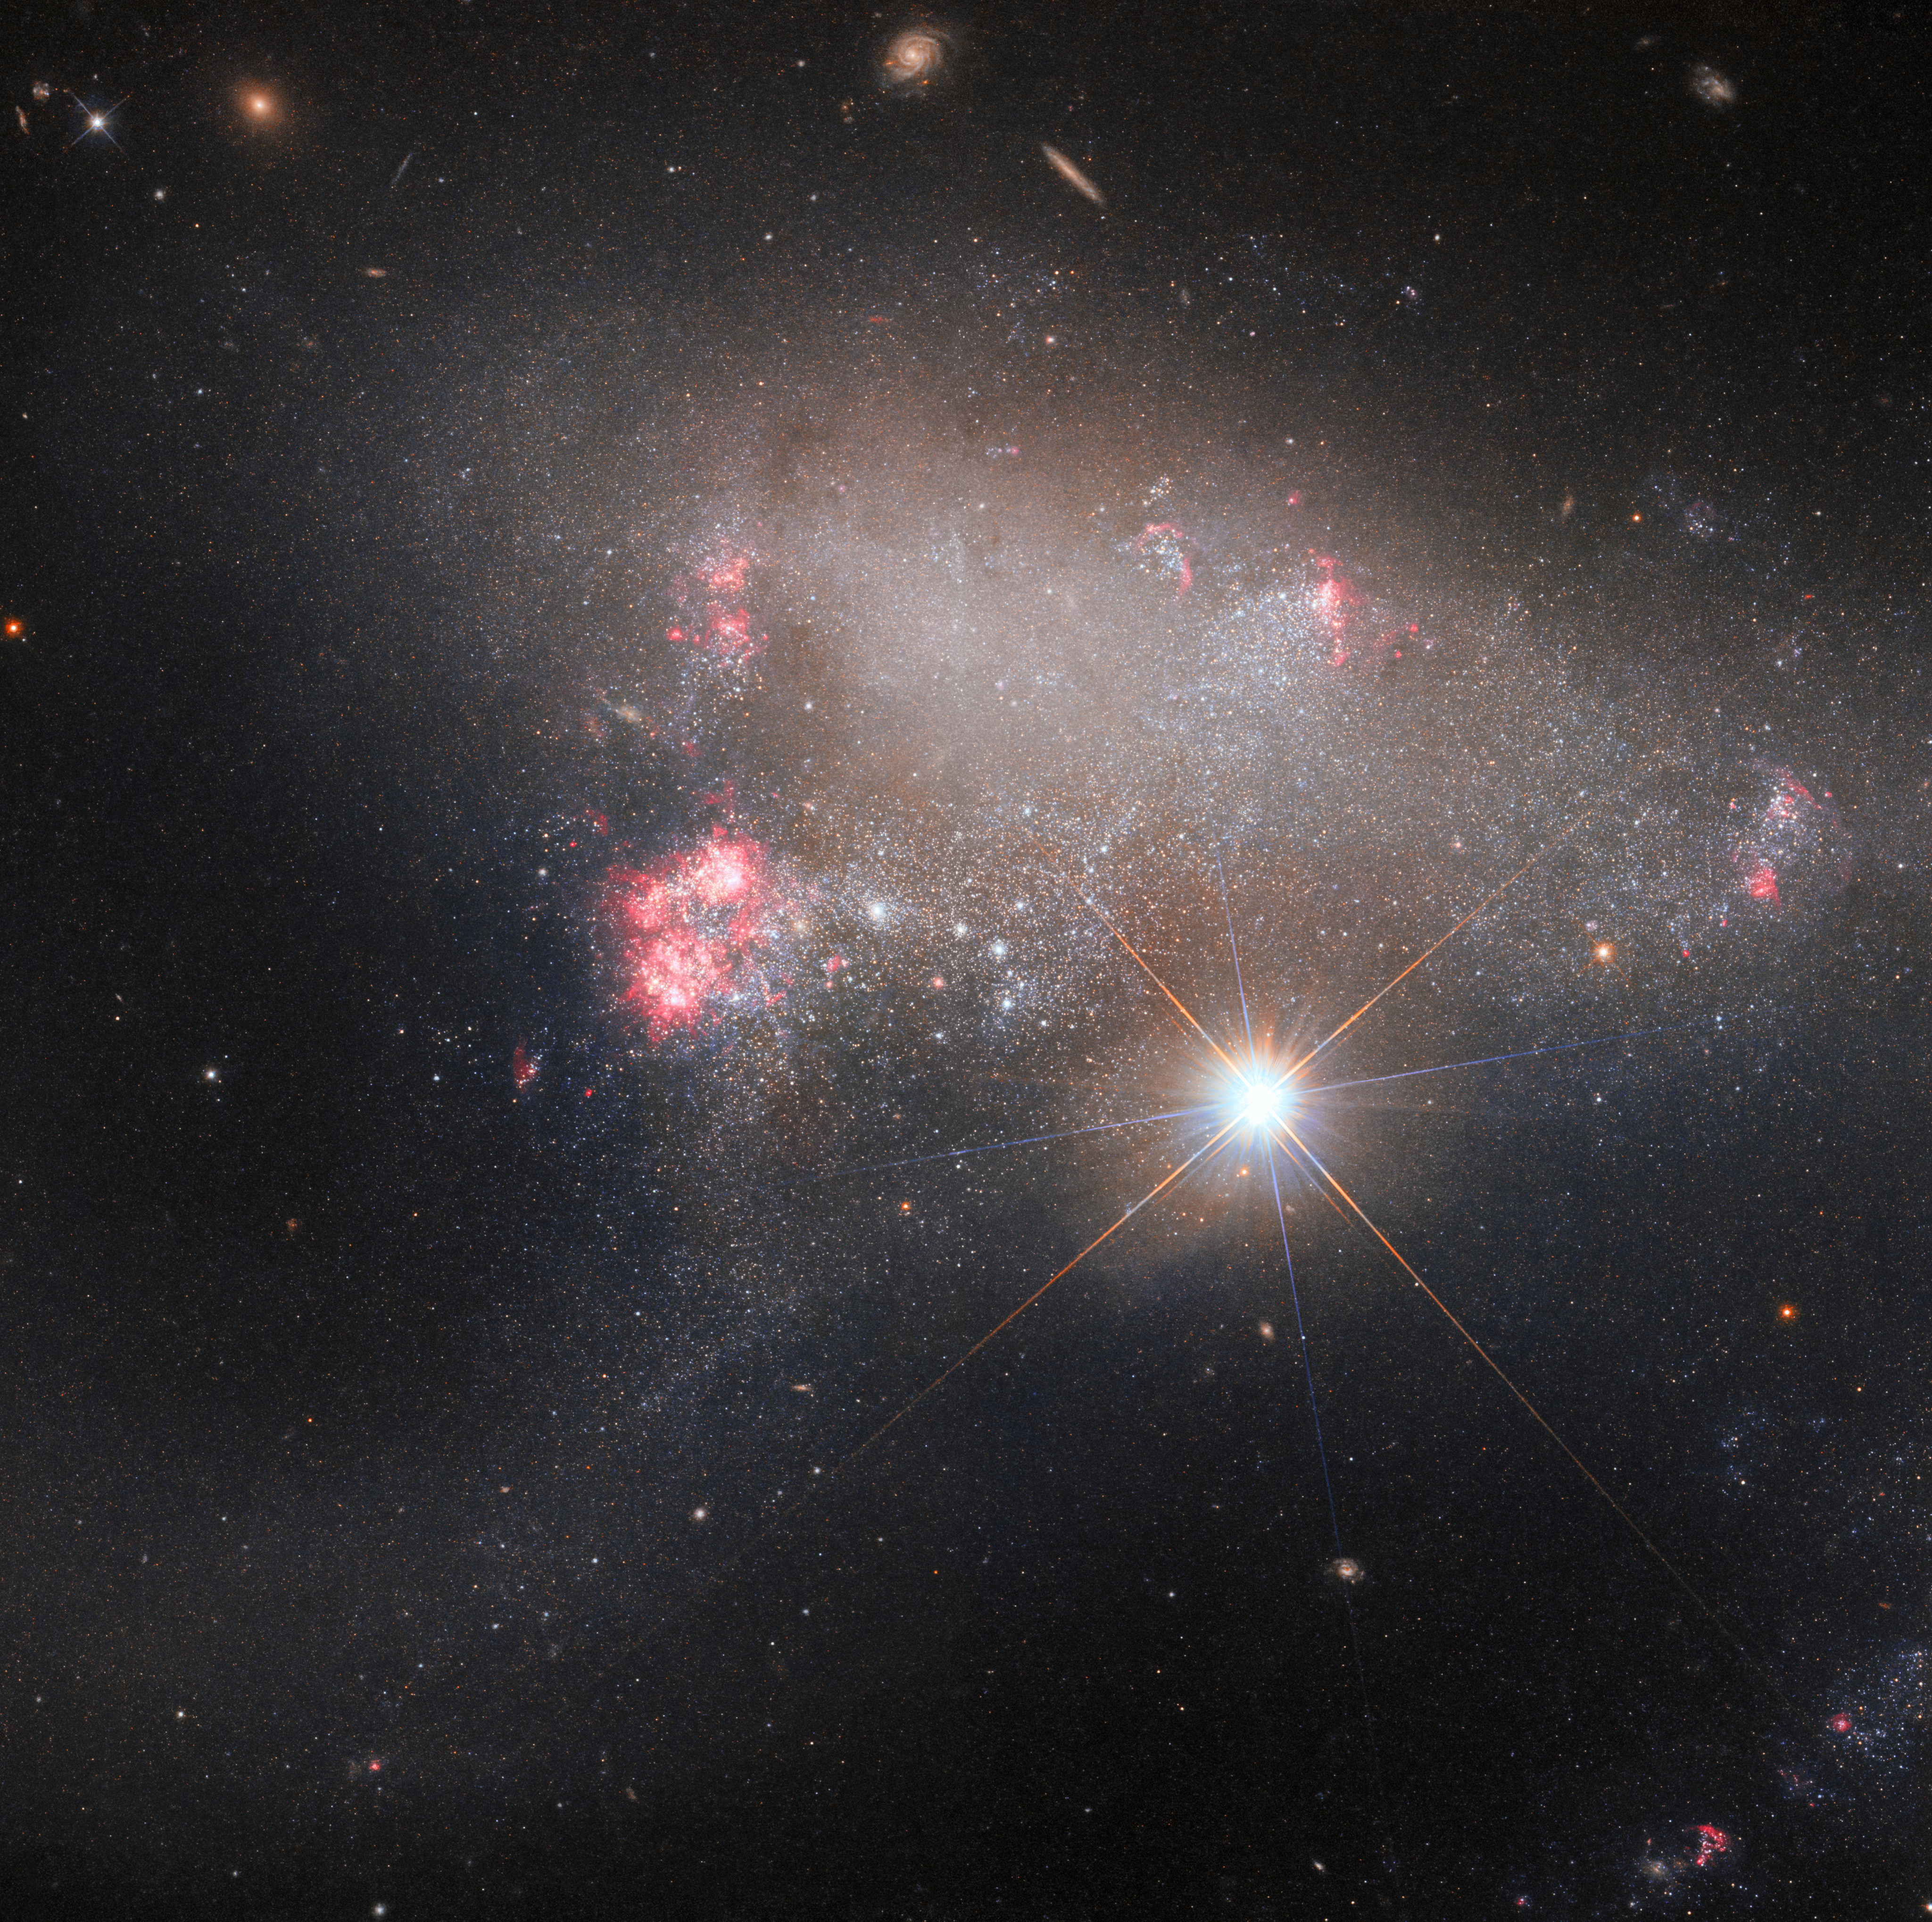

Starstruck image of Arp 263

The irregular galaxy Arp 263 lurks in the background of this image from the NASA/ESA Hubble Space Telescope, but the view is dominated by a stellar photobomber; the bright star BD+17 2217. Arp 263 — also known as NGC 3239 — is a patchy, irregular galaxy studded with regions of recent star formation, and astronomers believe that its ragged appearance is due to its having formed from the merger of two galaxies. It lies around 25 million light-years away in the constellation Leo.

Two different Hubble investigations into Arp 263, using two of Hubble’s third-generation instruments, contributed data to this image. The first investigation was part of an effort to observe the sites of recent supernovae, such as the supernova SN 2012A that was detected just over a decade ago in Arp 263. Astronomers used Hubble’s powerful Wide Field Camera 3 to search for lingering remnants of the colossal stellar explosion. The second investigation is part of a campaign using Hubble’s Advanced Camera for Surveys to image all the previously unobserved peculiar galaxies in the Arp catalogue, including Arp 263, in order to find promising subjects for further study using the NASA/ESA/CSA James Webb Space Telescope.

The interloping foreground star, BD+17 2217, is adorned with two sets of criss-crossing diffraction spikes. The interaction of light with Hubble’s internal structure means that concentrated bright objects such as stars are surrounded by four prominent spikes. Since this image of BD+17 2217 was created using two sets of Hubble data, the spikes from both images surround this stellar photobomber. The spikes are at different angles because Hubble was at different orientations when it collected the two datasets.

Credit: ESA/Hubble & NASA, J. Dalcanton, A. Filippenko